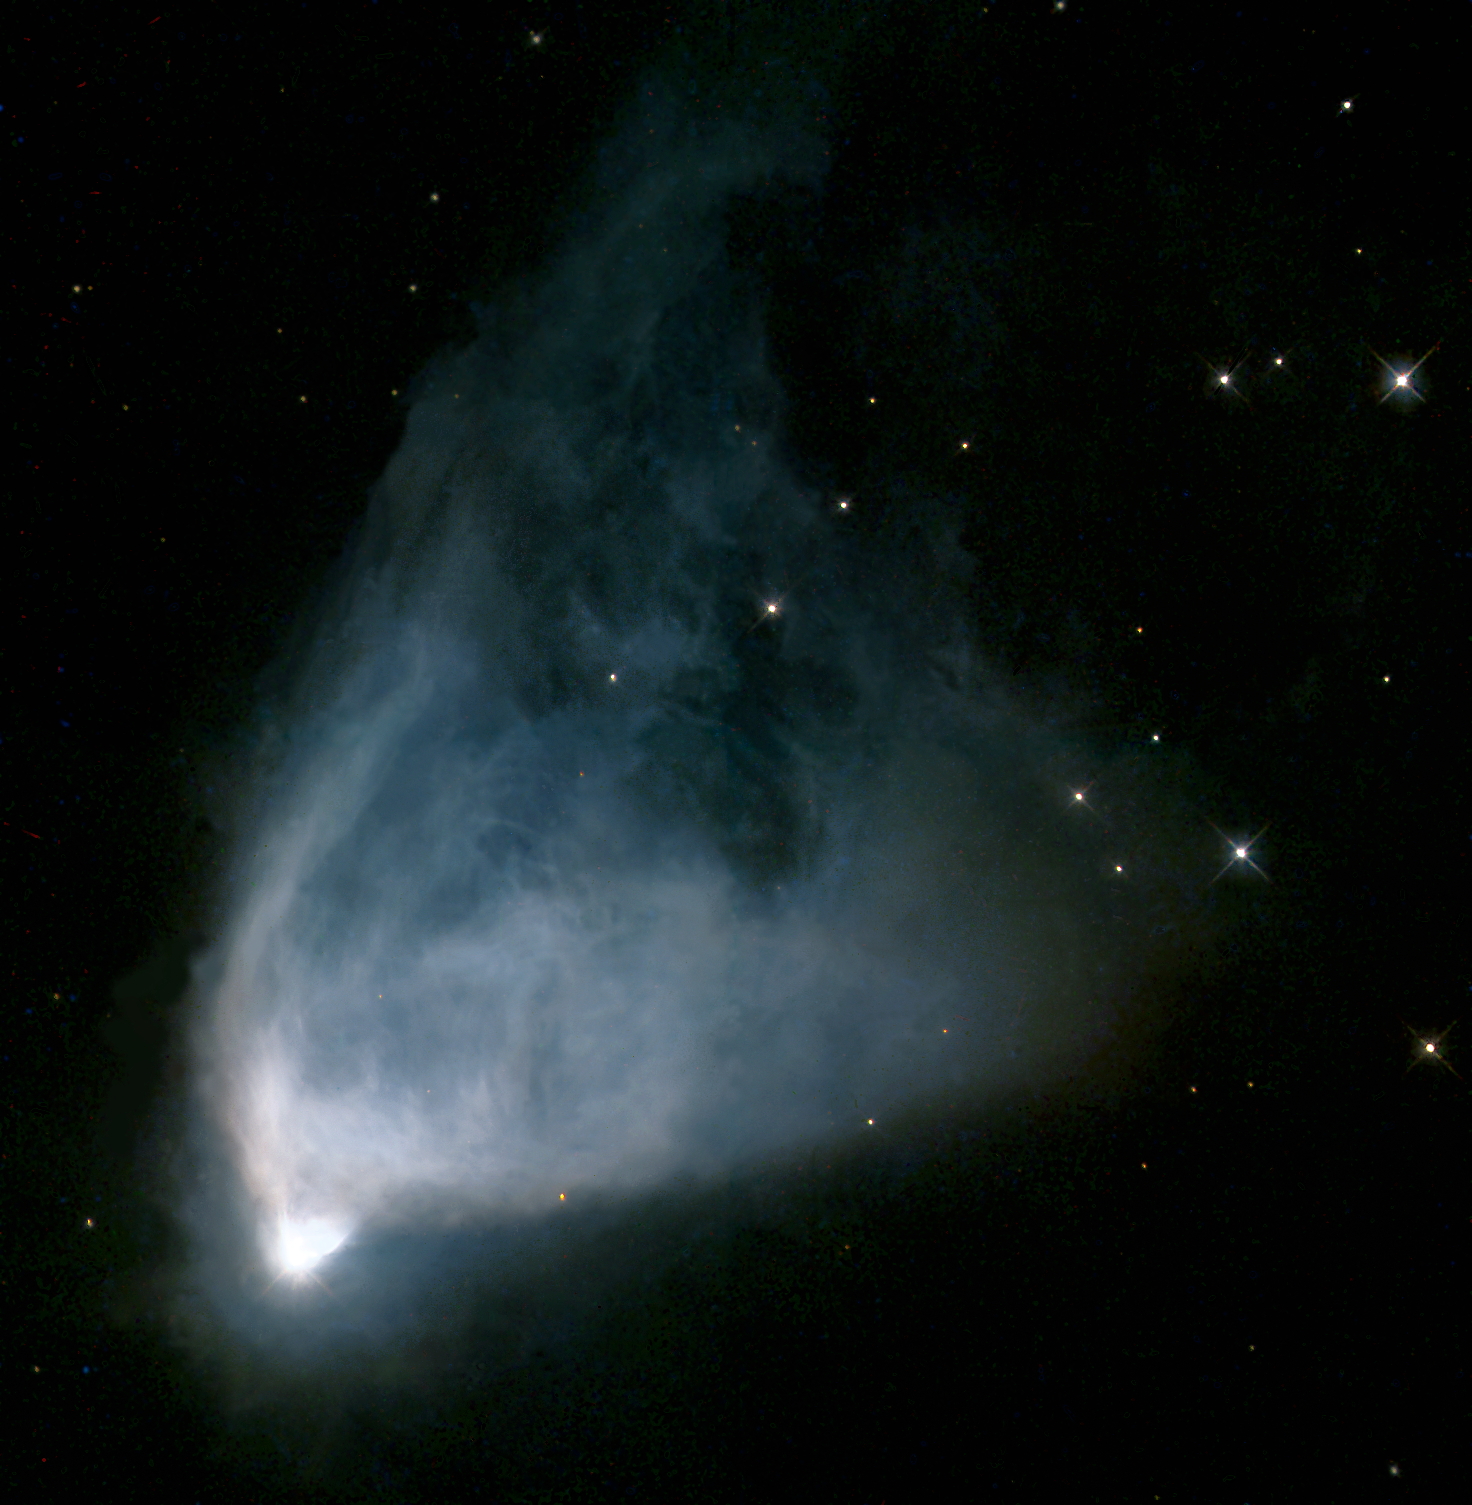

Hubble's variable nebula (NGC 2261)

Hubble's variable nebula is named (like the Hubble telescope itself) after the American astronomer Edwin P. Hubble, who carried out some ofthe early studies of this object. It is a fan-shaped cloud of gas and dust which is illuminated by R Monocerotis (R Mon), the bright star at the bottom end of the nebula. Dense condensations of dust near the star cast shadows out into the nebula, and as they move the illumination changes, giving rise to the variations first noted by Hubble. The star itself, lying about 2,500 light-years from Earth, cannot be seen directly, but only through light scattered off of dust particles in the surrounding nebula. R Mon is believed to have a mass of about 10 times that of the Sun, and to have an age of only 300,000 years. There is probably a symmetrical counterpart of the fan-shaped nebula on the southern side of the star, but it is heavily obscured from view by dust lying between this lobe and our line of sight.

The Hubble Heritage team made this image from observations of R Mon acquired by William Sparks (STScI), Sylvia Baggett (STScI) and collaborators.

Credit: NASA/ESA and The Hubble Heritage Team (AURA/STScI).